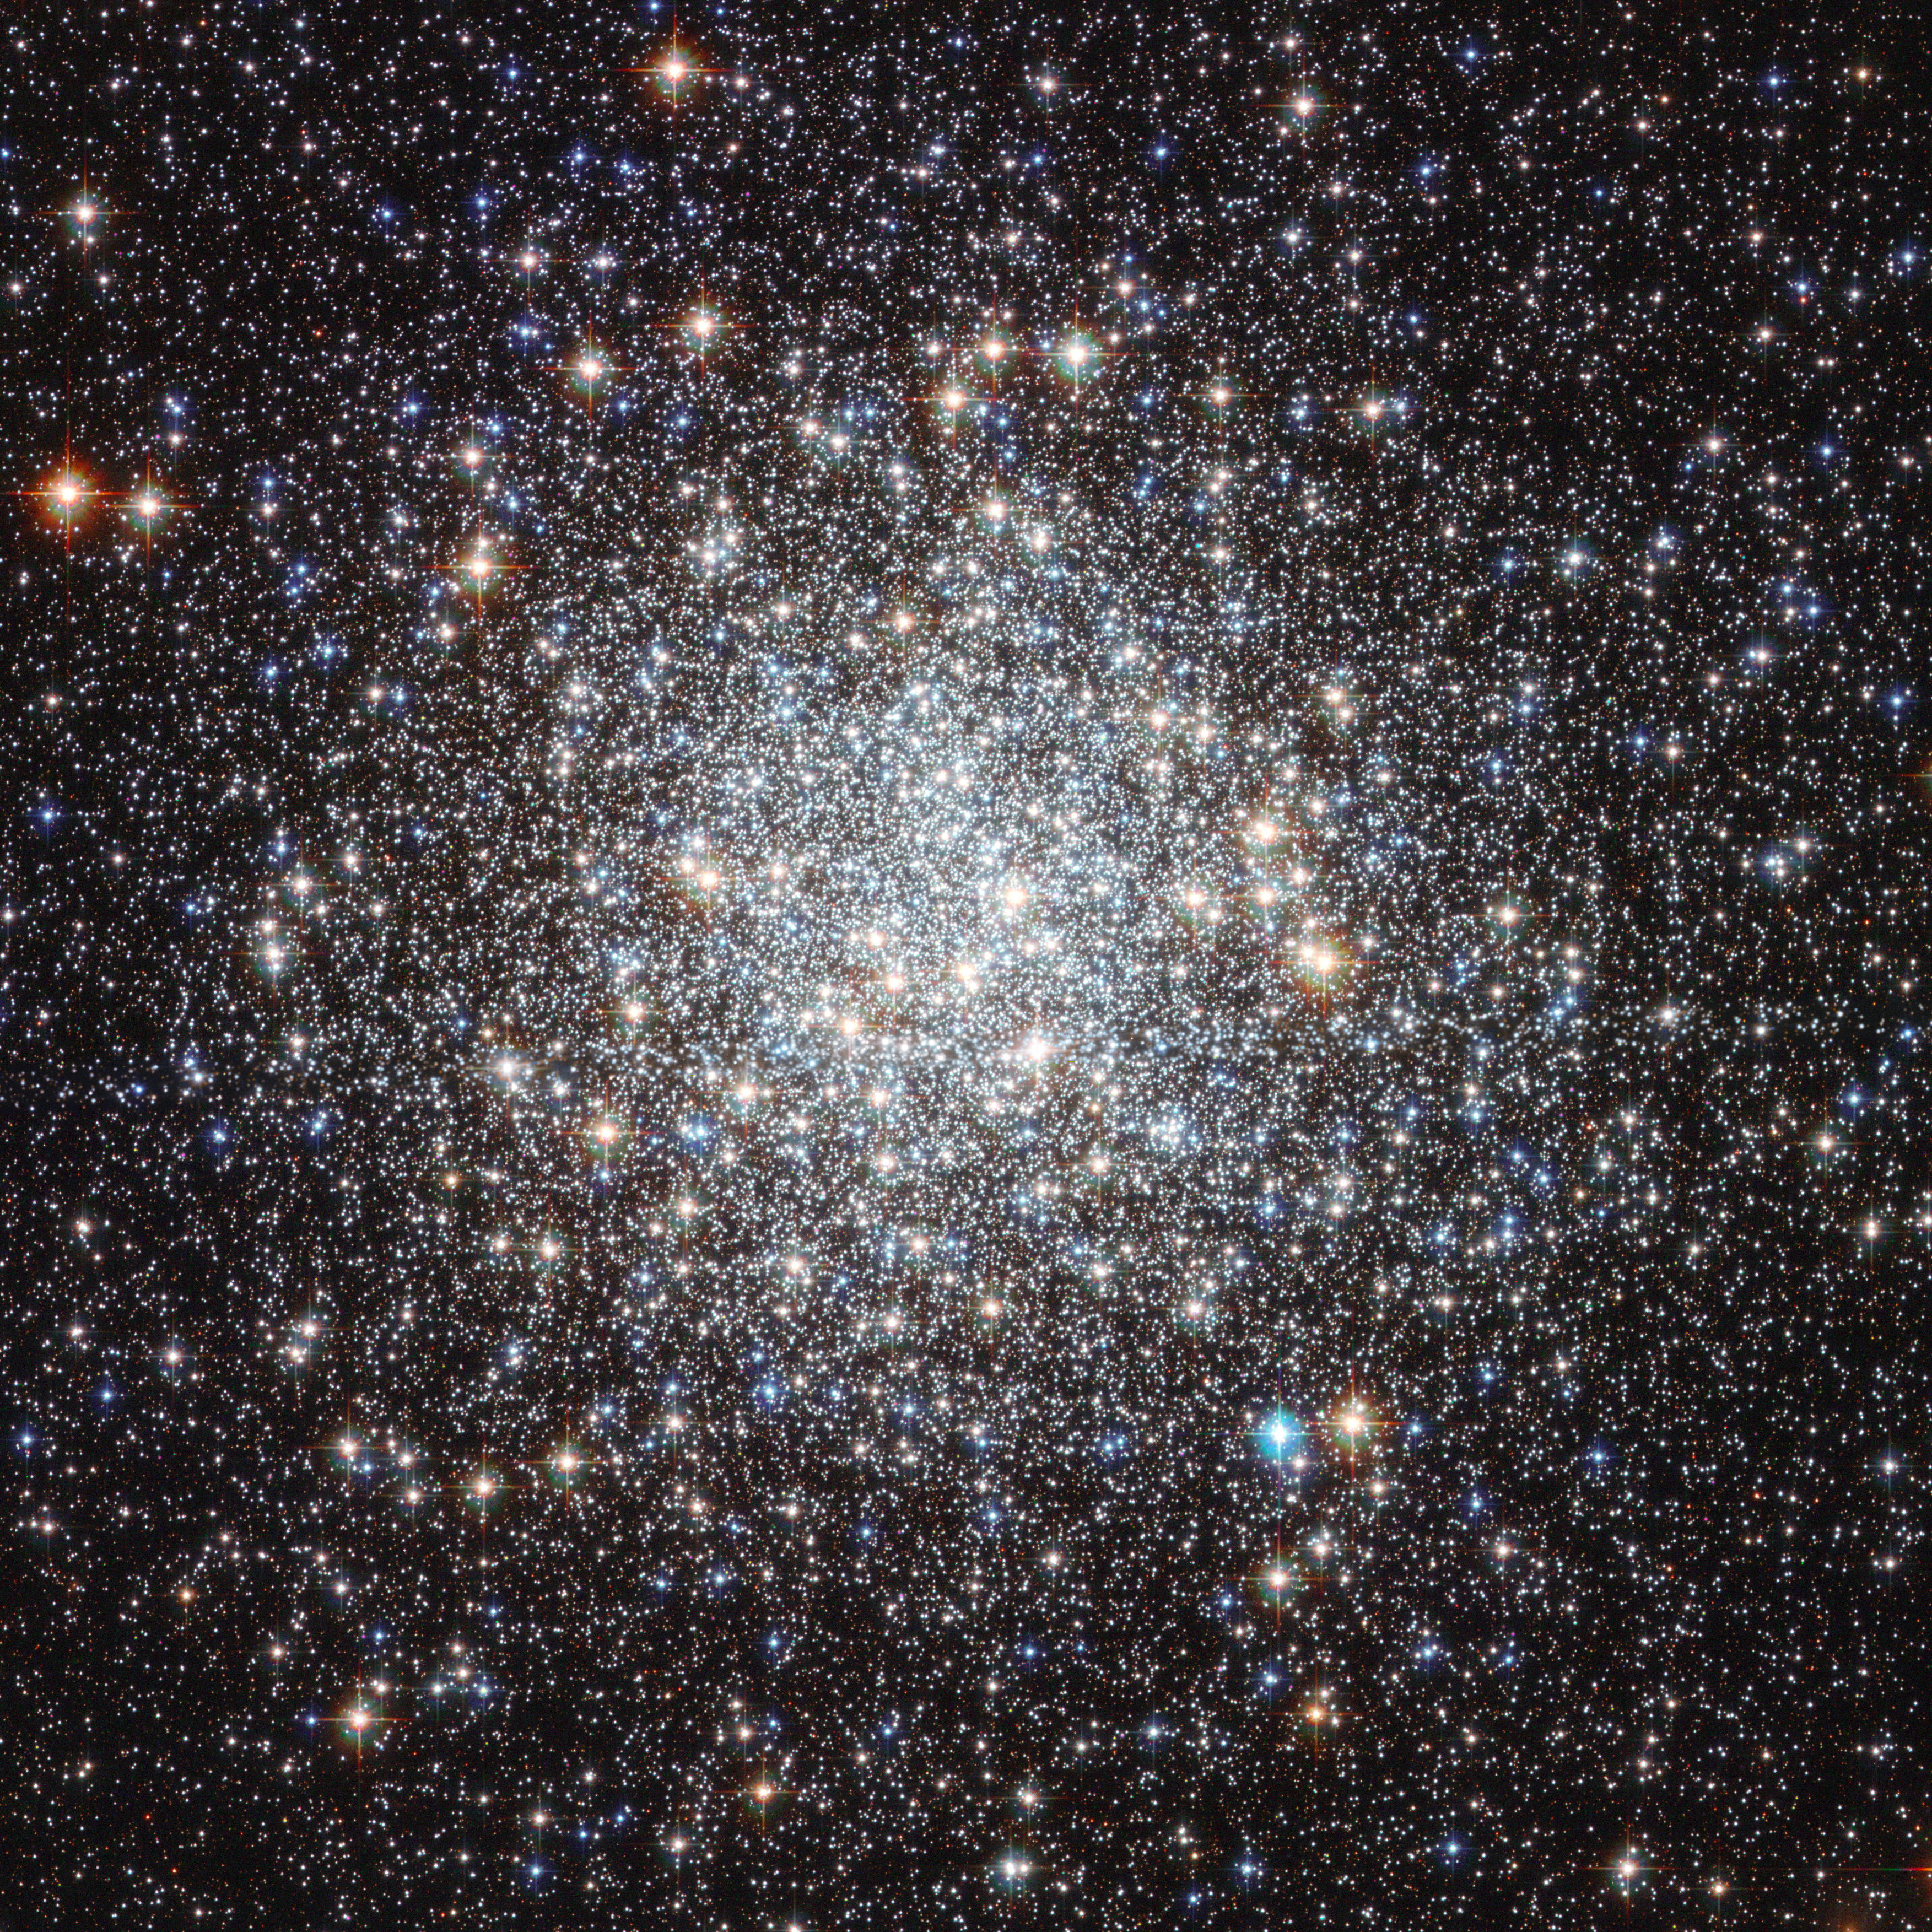

Hubble image of Messier 9

This image from the NASA/ESA Hubble Space Telescope shows the globular cluster Messier 9. Hubble’s image resolves stars right into the centre of the cluster, and clearly shows they have different colours. Redder colours signify lower surface temperatures, while blue stars are extremely hot.

Credit: NASA & ESA